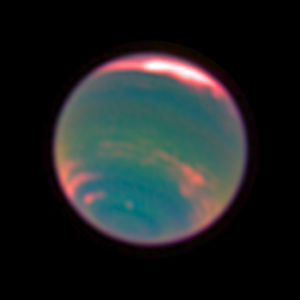

Neptune - methane band

The methane band is clearly visible in this image of our Solar System's most distant world.

Credit: NASA, ESA, E. Karkoschka (University of Arizona), and H.B. Hammel (Space Science Institute, Boulder, Colorado)